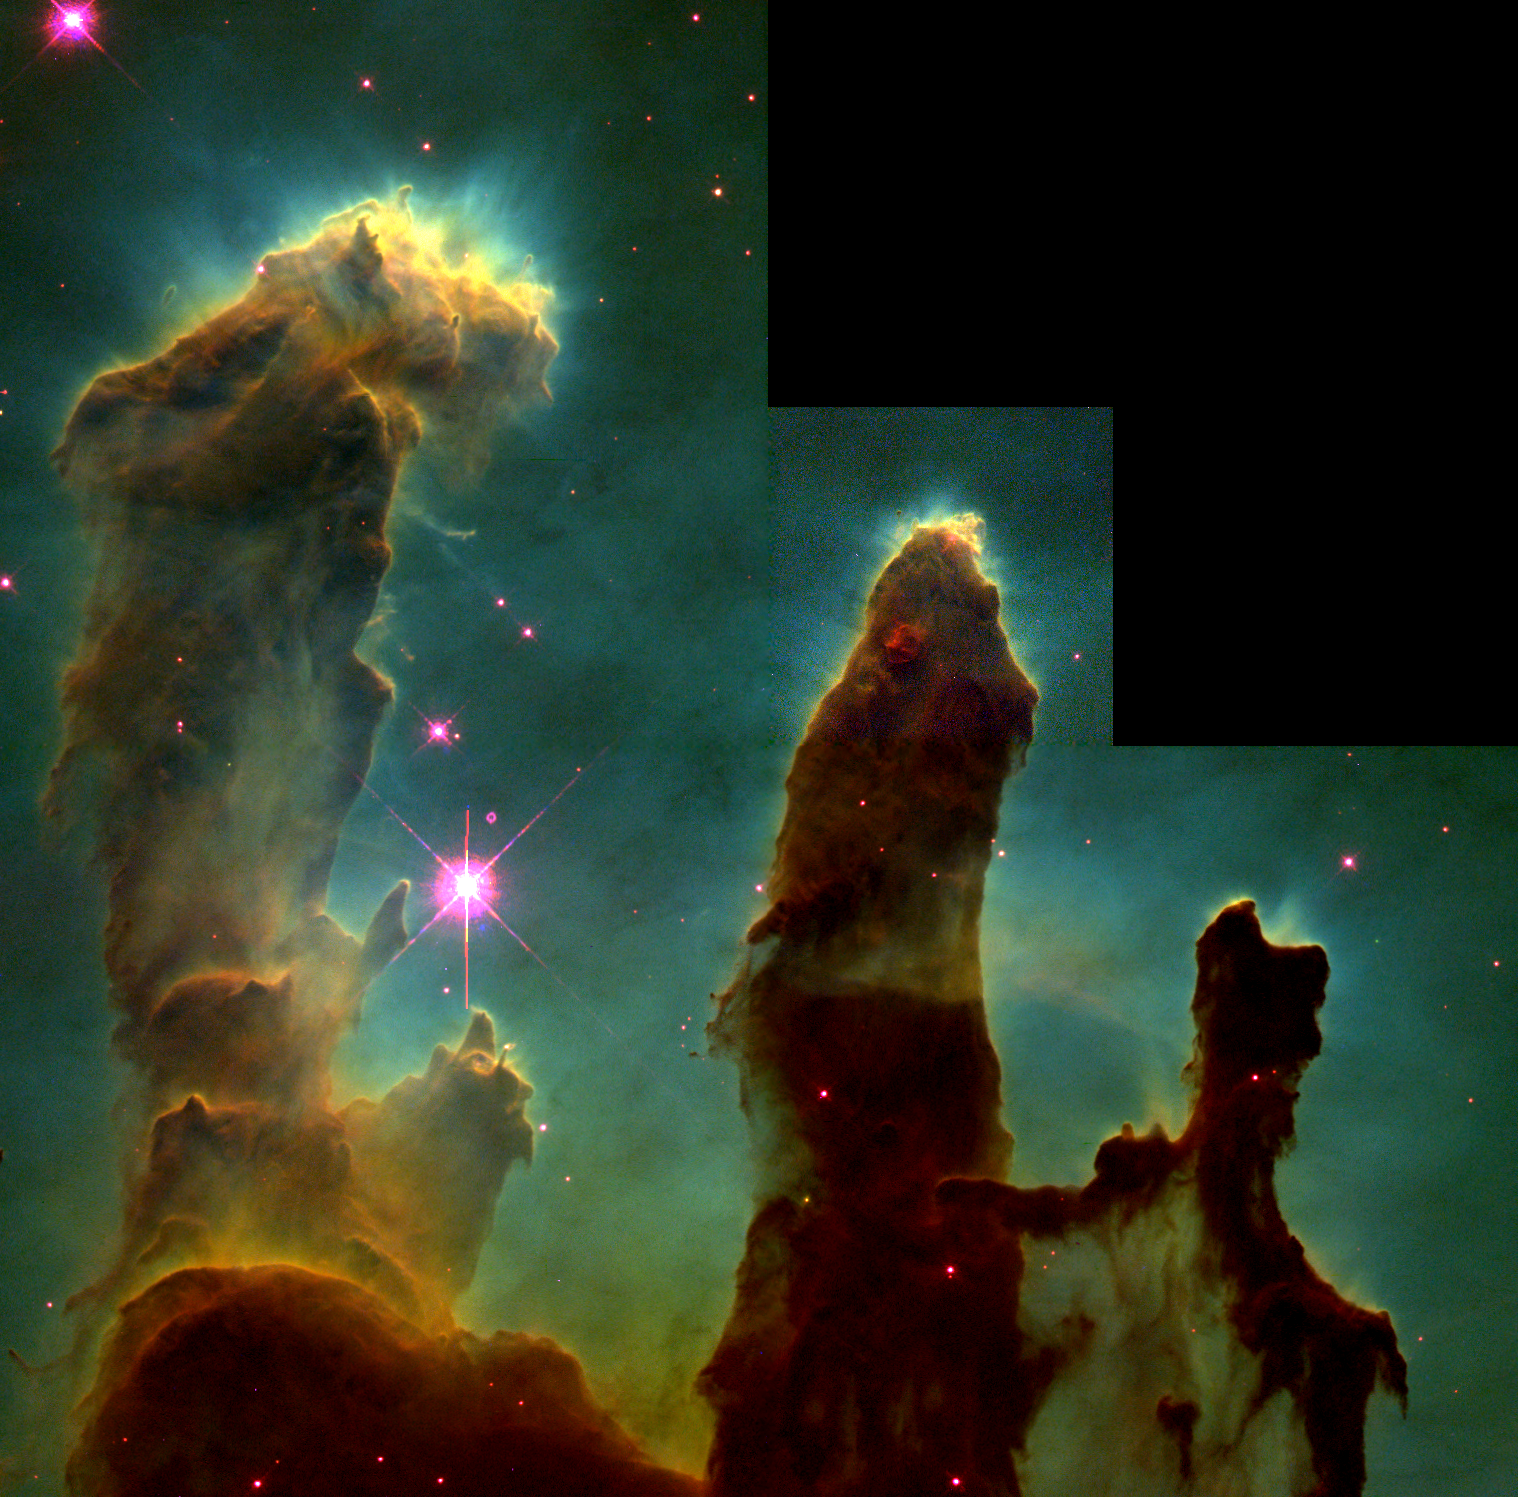

Pillars of Creation

Undersea coral? Enchanted castles? Space serpents? These eerie, dark pillar-like structures are actually columns of cool interstellar hydrogen gas and dust that are also incubators for new stars. The pillars protrude from the interior wall of a dark molecular cloud like stalagmites from the floor of a cavern.

Credit: Jeff Hester and Paul Scowen (Arizona State University), and NASA/ESA